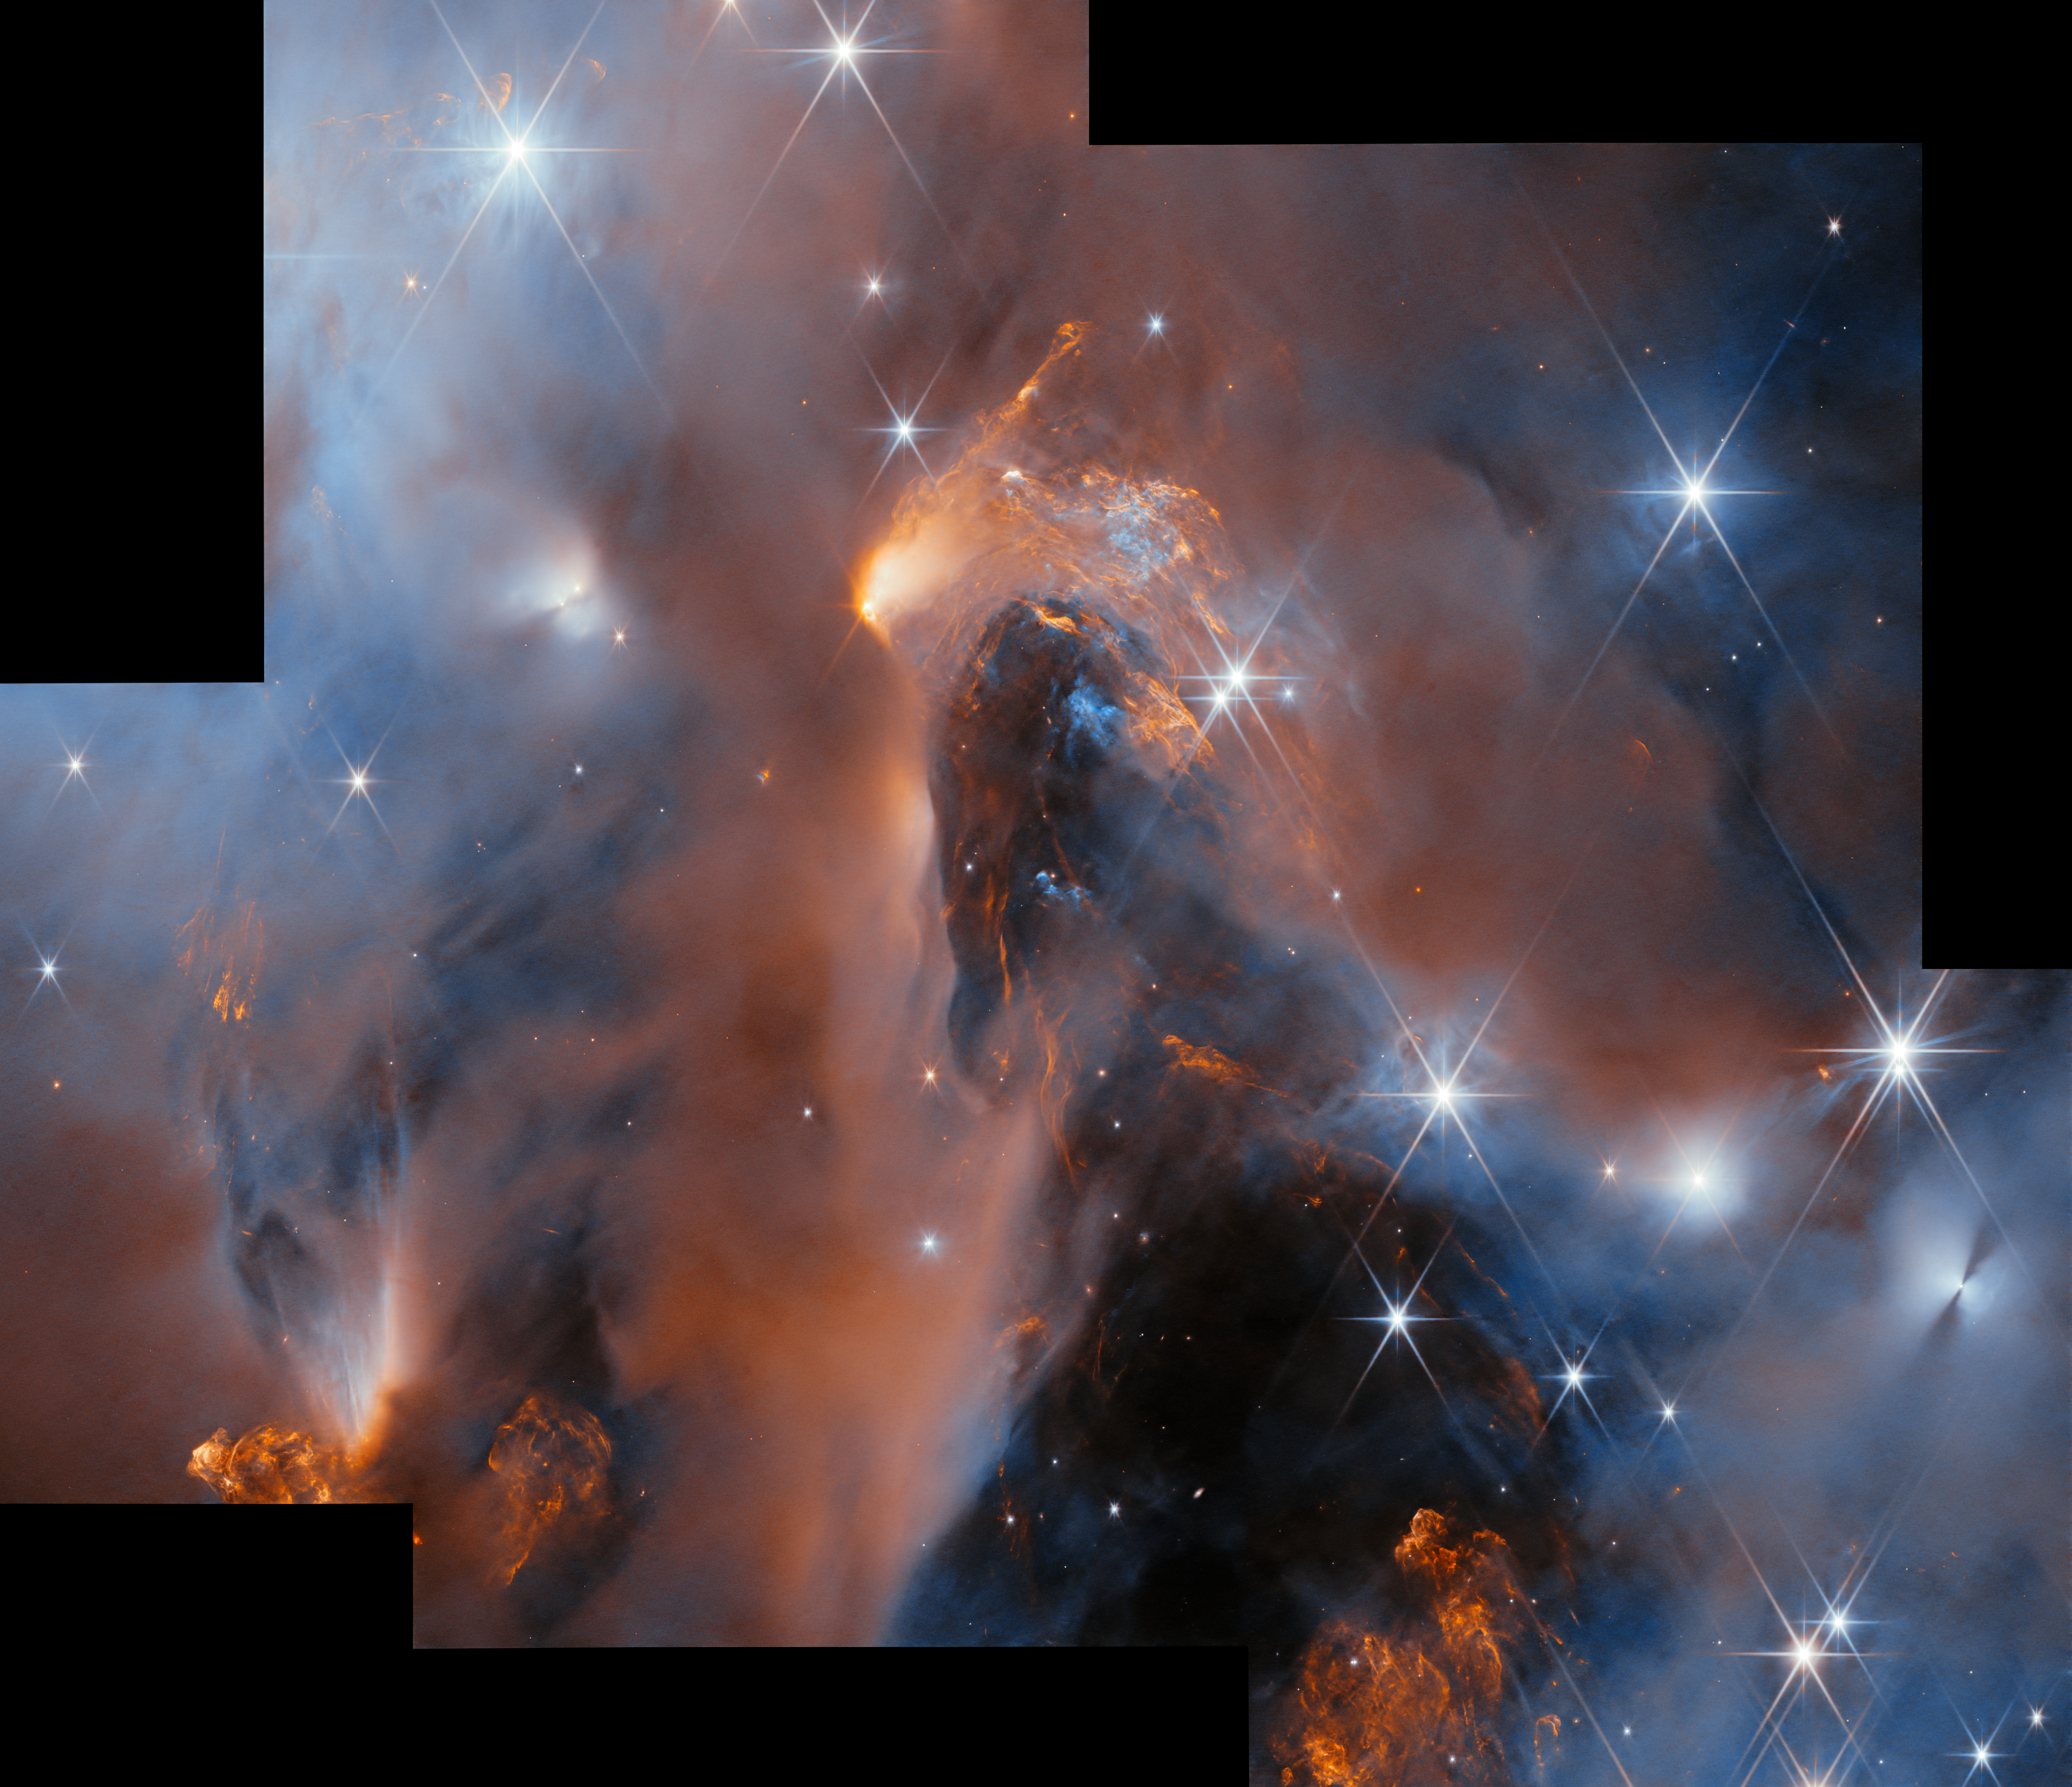

Peeking into Perseus (wide field view)

This stunning new mosaic of images from the NASA/ESA/CSA James Webb Space Telescope showcases the nearby star-forming cluster, NGC 1333. The nebula is in the Perseus molecular cloud, and located approximately 960 light-years away.

Webb’s superb sensitivity allows astronomers to investigate young objects with extremely low masses. Some of the faintest ‘stars’ in the picture are in fact newly born free-floating brown dwarfs with masses comparable to those of giant planets.

The same cluster was featured as the 33rd anniversary image of the NASA/ESA Hubble Space Telescope in April of 2023. Hubble’s image just scratched the surface of this region, because clouds of dust obscure much of the star formation process. Observing with larger aperture and in the infrared part of the spectrum, Webb is capable of peering through the dusty veil to reveal newborn stars, brown dwarfs and planetary mass objects.

The centre of the image presents a deep peek into the heart of the NGC1333 cloud. Across the image we see large patches of orange, which represent gas glowing in the infrared. These so-called Herbig-Haro objects form when ionised material ejected from young stars collides with the surrounding cloud. They are hallmarks of a very active site of star formation.

Many of the young stars in this image are surrounded by disks of gas and dust, which may eventually produce planetary systems. On the right hand side in the image, we can glimpse the shadow of one of these disks oriented edge-on - two dark cones emanating on opposite sides, seen against a bright background.

Similar to the young stars in this mosaic, our own Sun and planets formed inside a dusty molecular cloud, 4.6 billion years ago. Our Sun didn’t form in isolation but as part of a cluster, which was perhaps even more massive than NGC 1333. The cluster in the mosaic, only 1-3 million years old, presents us with an opportunity to study stars like our Sun, as well as brown dwarfs and free-floating planets, in their nascent stages.

The images were captured as part of the Webb observation programme 1202 (PI: A. Scholz) to survey a large portion of NGC1333. These data constitute the first deep spectroscopic survey of the young cluster, and have identified brown dwarfs down to planetary masses using the observatory’s Near-InfraRed Imager and Slitless Spectrograph (NIRISS). The first results from this survey have been accepted for publication in the Astronomical Journal.

Credit: ESA/Webb, NASA & CSA, A. Scholz, K. Muzic, A. Langeveld, R. Jayawardhana